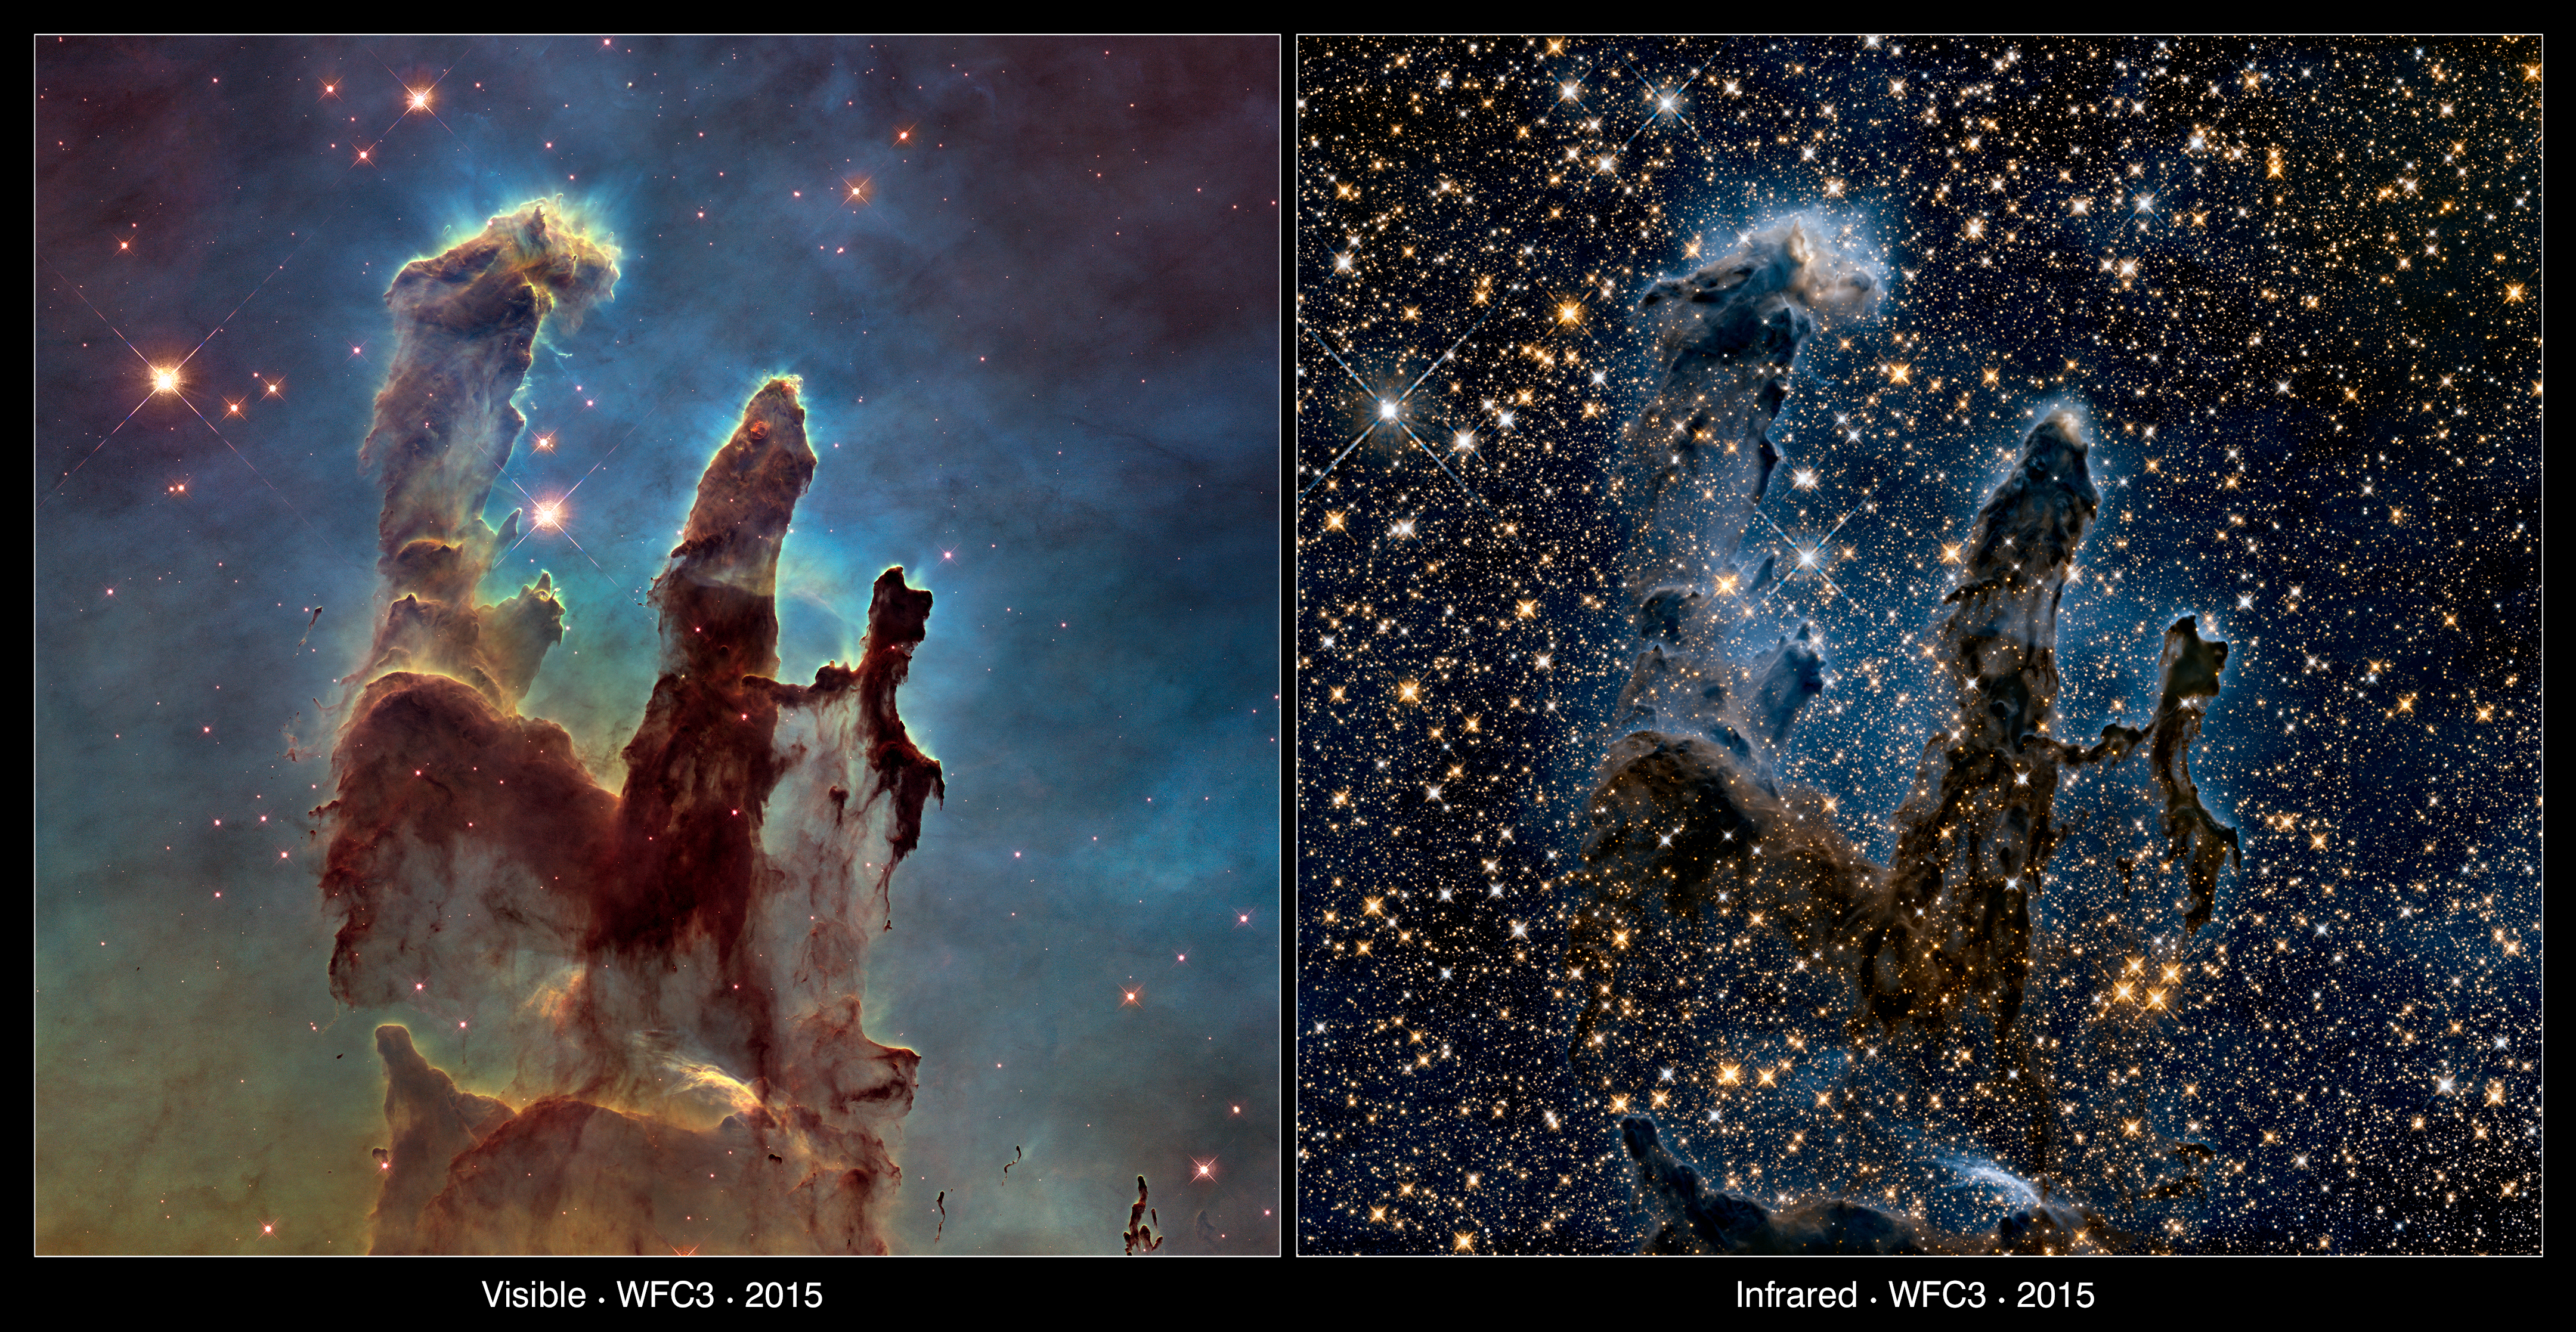

The Pillars of Creation — visible and infrared comparison

This image compares two new views of the Eagle Nebula’s Pillars of Creation captured by Hubble.

On the left the pillars are seen in visible light, capturing the multi-coloured glow of gas clouds, wispy tendrils of dark cosmic dust, and the rust-coloured elephants’ trunks of the nebula’s famous pillars.

The right image is taken in infrared light, which penetrates much of the obscuring dust and gas and unveils a more unfamiliar view of the pillars.

Credit: NASA, ESA/Hubble and the Hubble Heritage Team